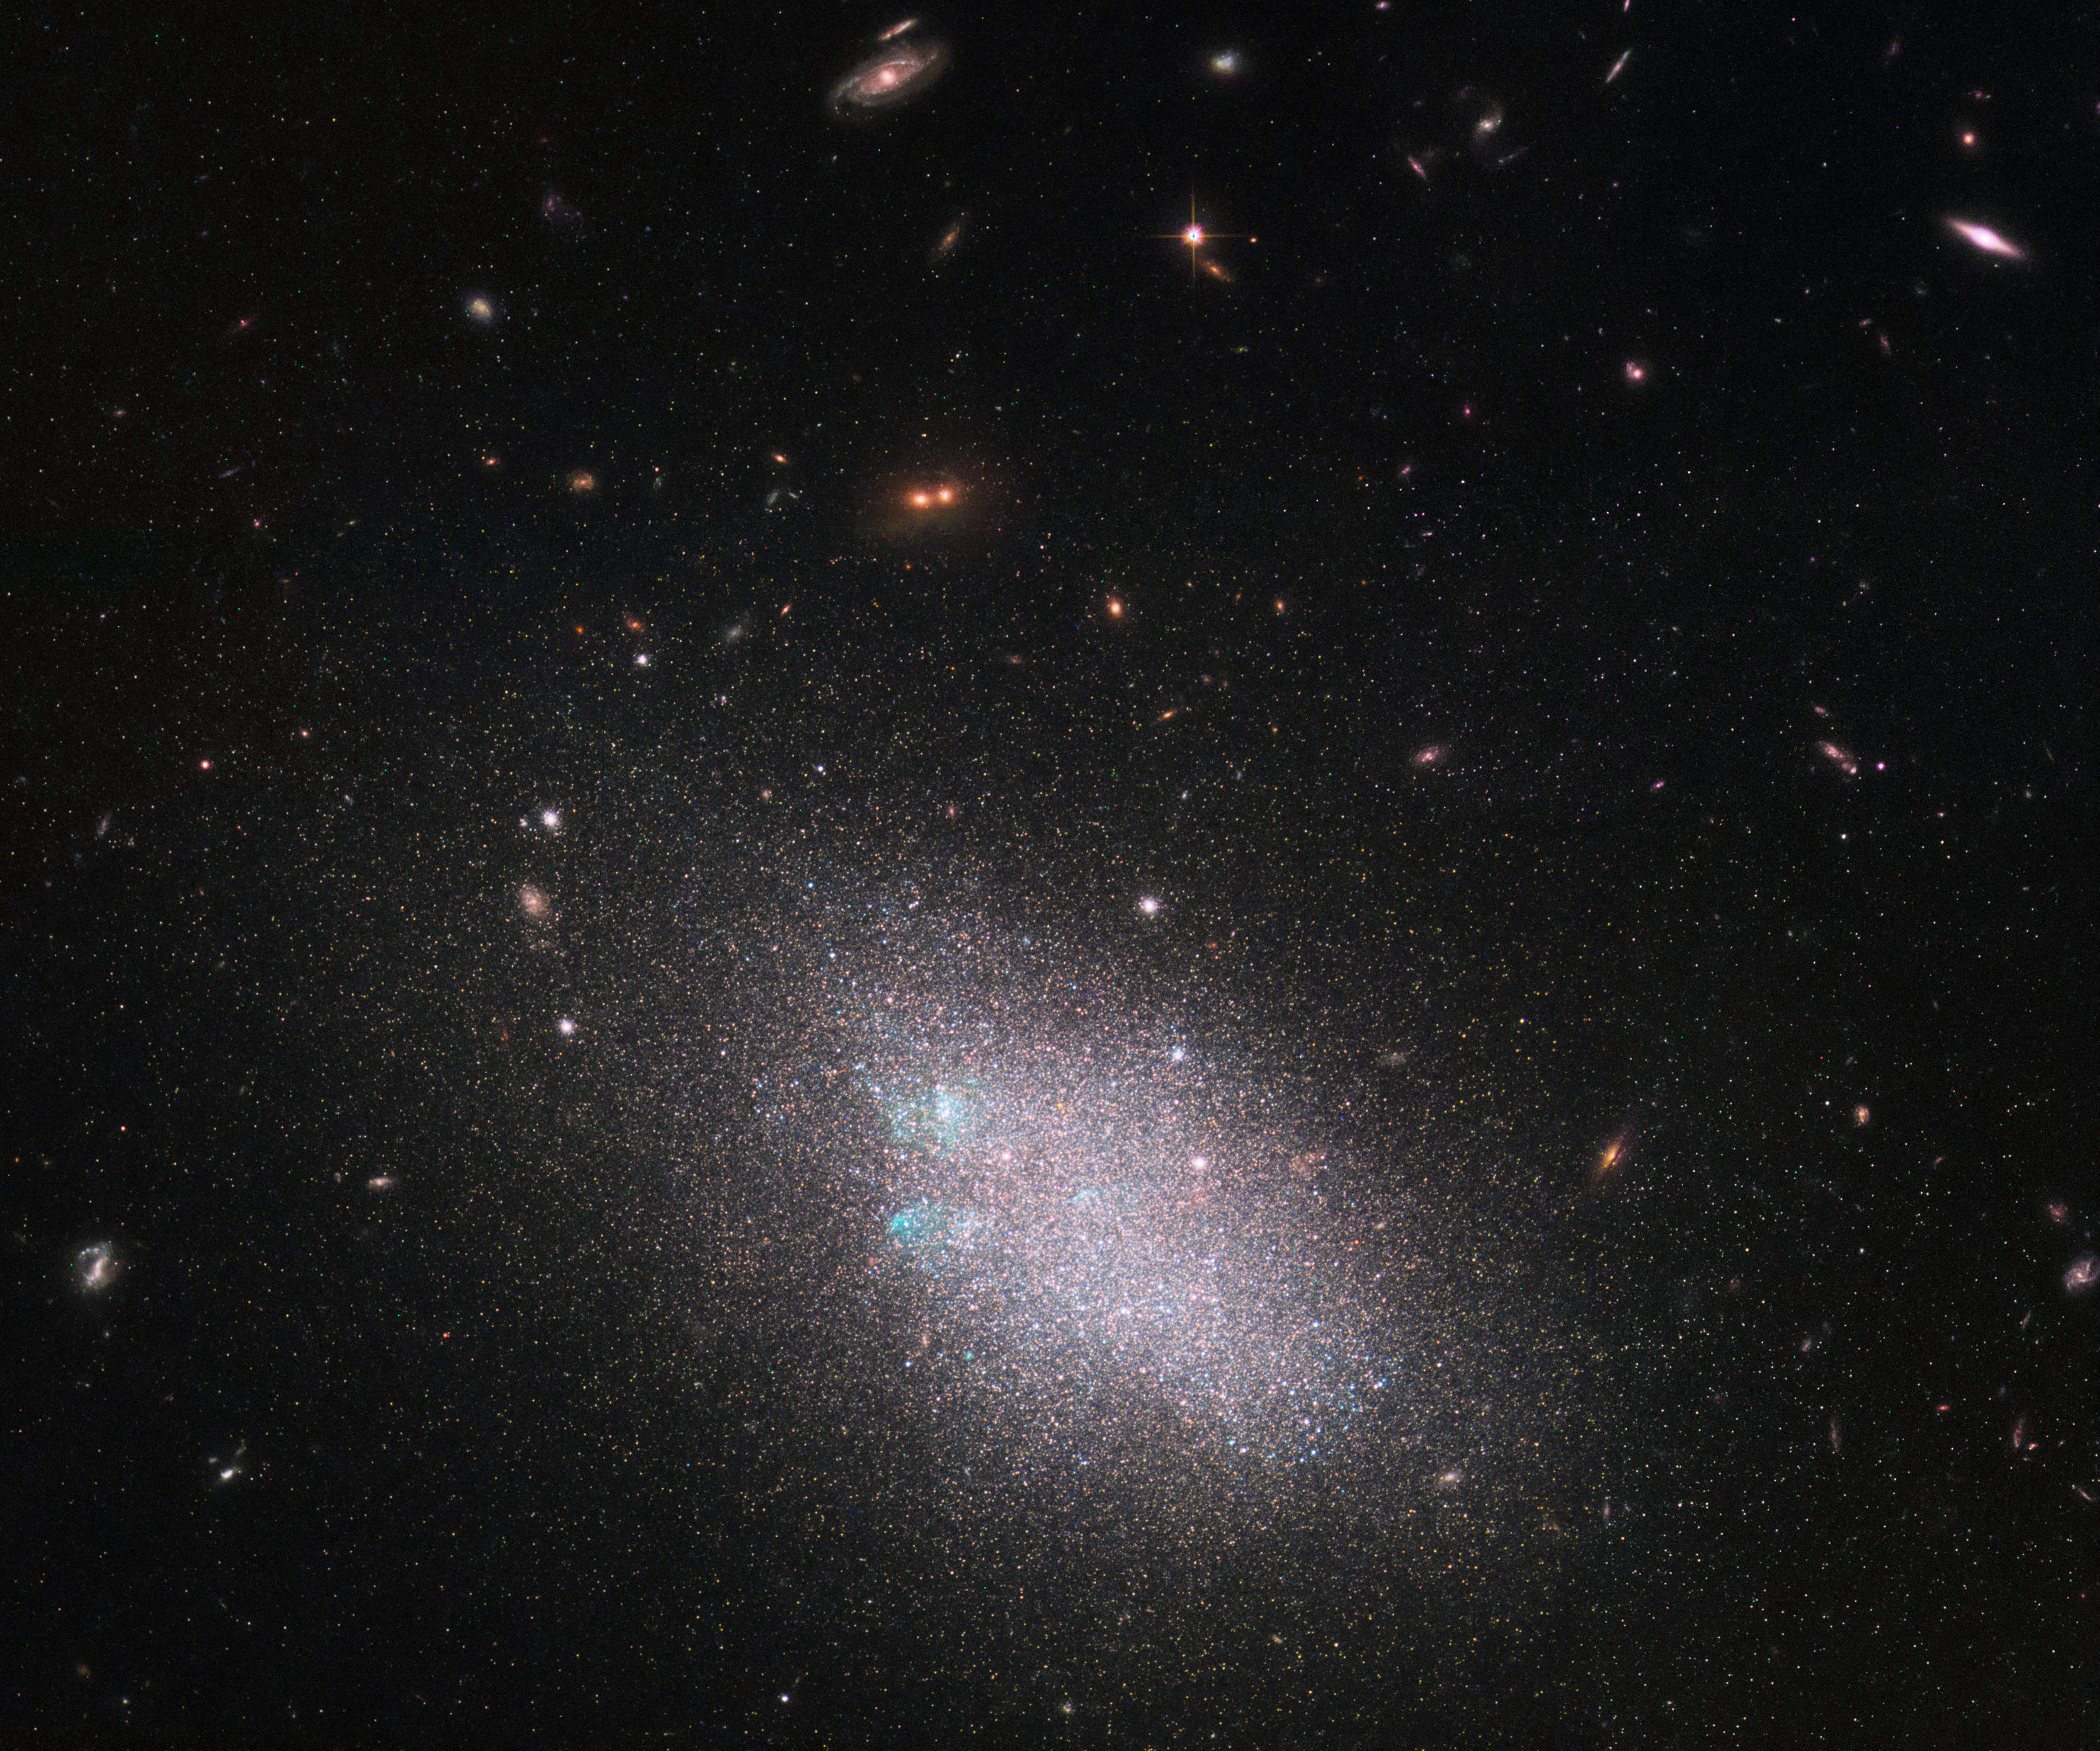

Hubble’s Legacy

This Picture of the Week shows a dwarf galaxy named UGC 685. Such galaxies are small and contain just a tiny fraction of the number of stars in a galaxy like the Milky Way. Dwarf galaxies often show a hazy structure, an ill-defined shape, and an appearance somewhat akin to a swarm or cloud of stars — and UGC 685 is no exception to this. Classified as an SAm galaxy — a type of unbarred spiral galaxy — it is located about 15 million light-years from Earth.

These data were gathered under the NASA/ESA Hubble Space Telescope’s LEGUS (Legacy ExtraGalactic UV Survey) Program, the sharpest and most comprehensive ultraviolet survey of star-forming galaxies in the nearby Universe.

LEGUS is imaging 50 spiral and dwarf galaxies in our cosmic neighbourhood in multiple colours using Hubble’s Wide Field Camera 3. The survey is picking apart the structures of these galaxies and resolving their constituent stars, clusters, groups, and other stellar associations. Star formation plays a huge role in shaping its host galaxy; by exploring these targets in detail via both new observations and archival Hubble data, LEGUS will shed light on how stars form and cluster together, how these clusters evolve, how a star’s formation affects its surroundings, and how stars explode at the end of their lives.

Credit: ESA/Hubble & NASA; the LEGUS team, B. Tully, D. Calzetti Acknowledgement(s): Judy Schmidt (Geckzilla)